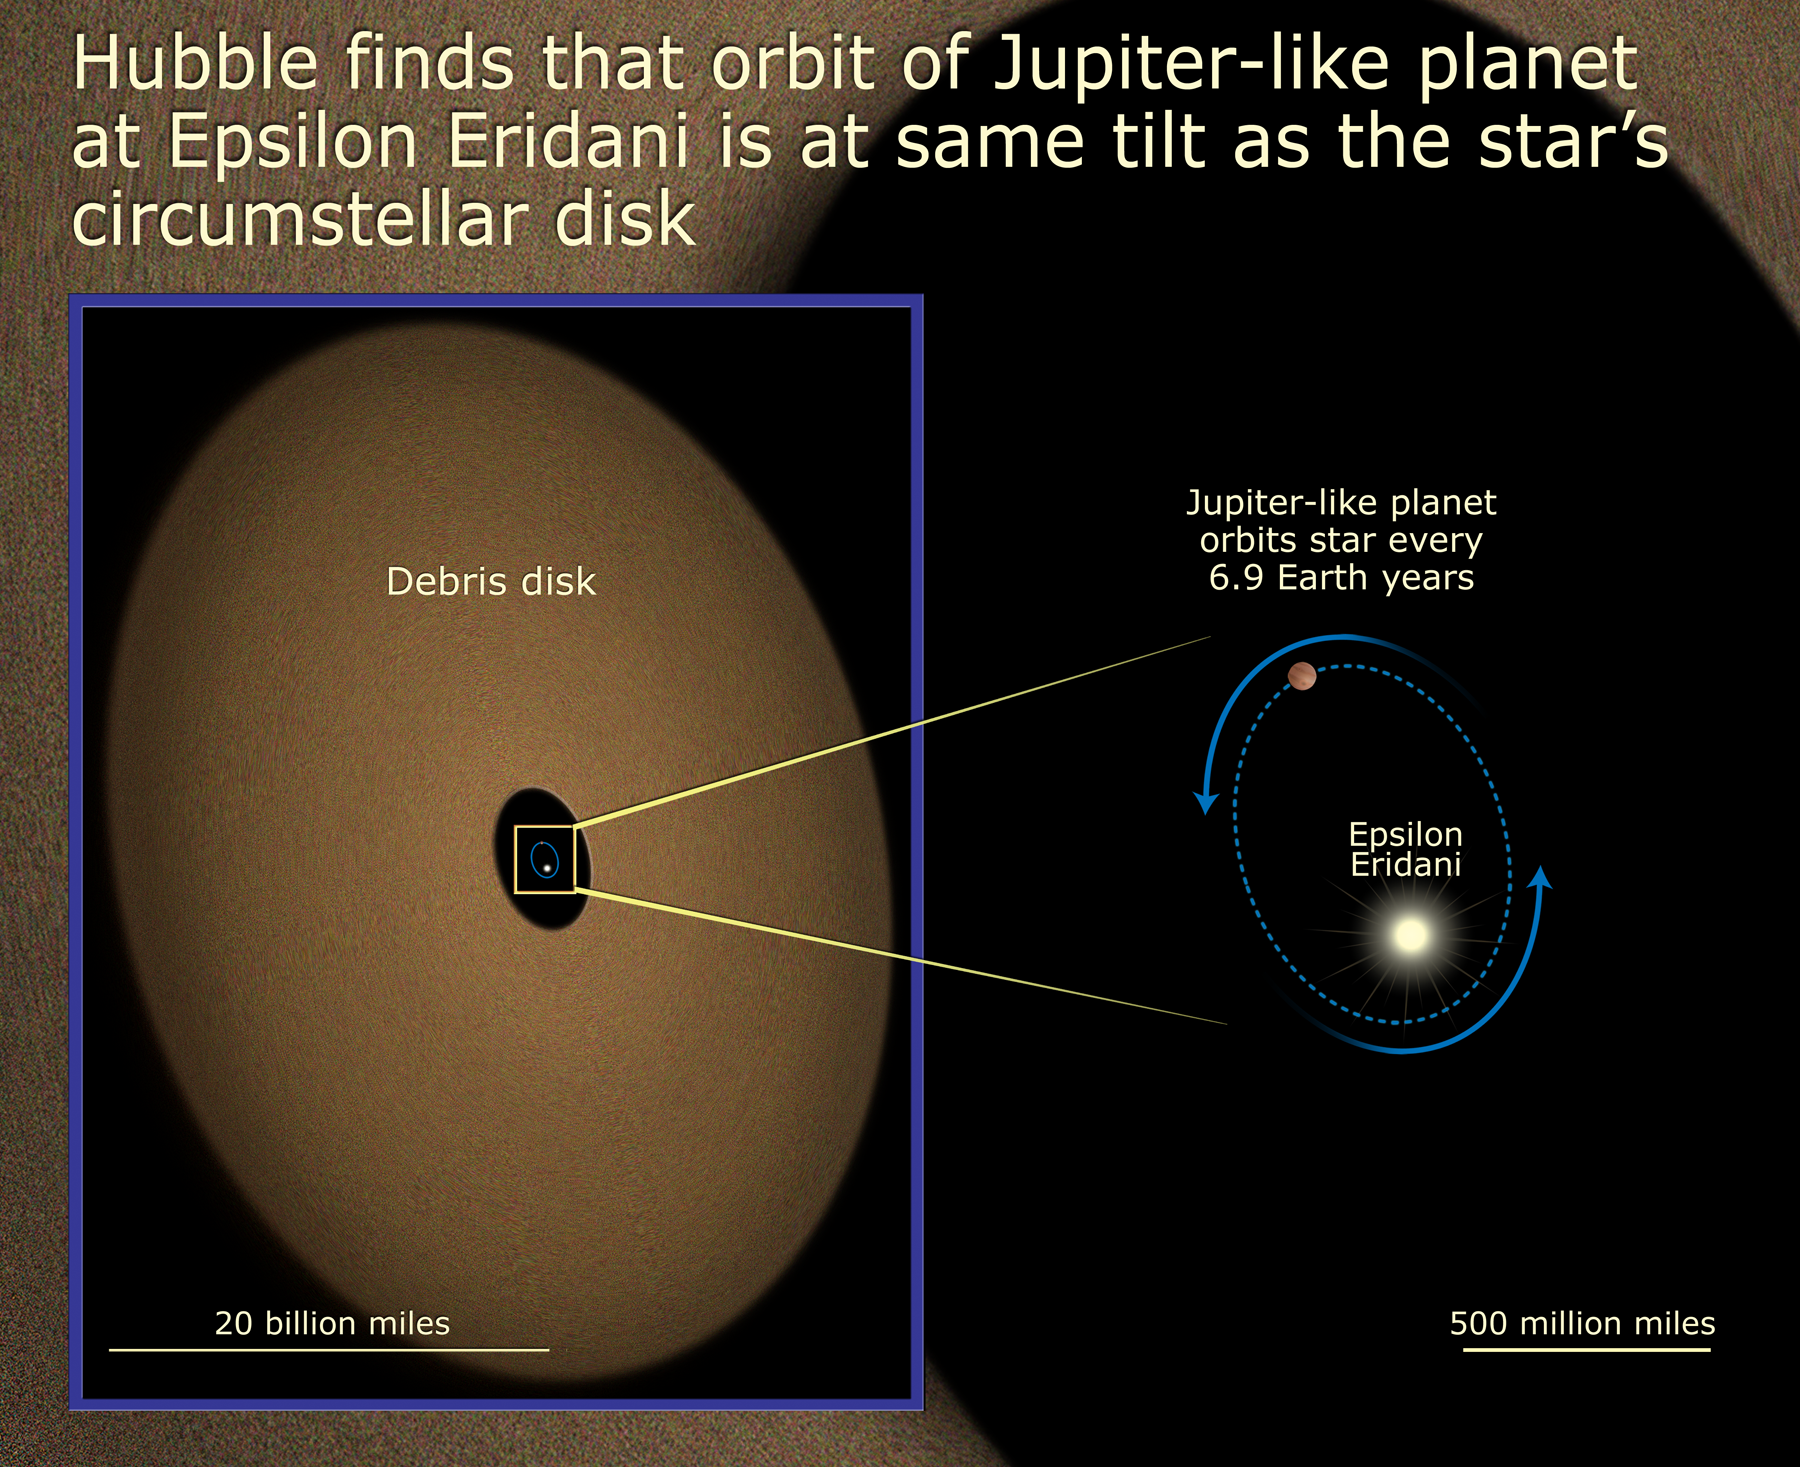

Epsilon Eridani's Tilt

Diagram explaining how the orbit of the Jupiter-like planet at Epsilon Eridani is at the same tilt as the star's circumstellar disc.

Credit: NASA, ESA and A. Field (STScI)